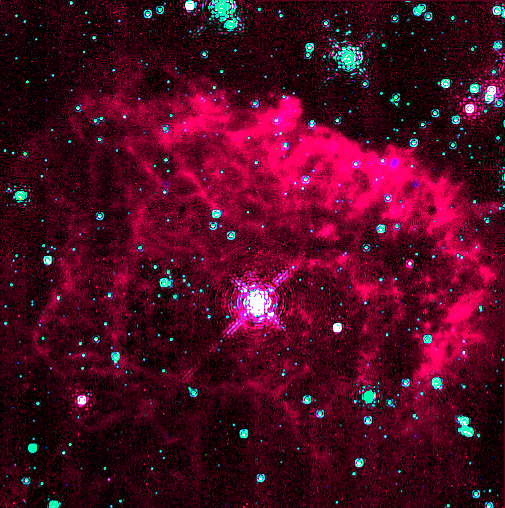

Hubble Uncovers Brilliant Star in Milky Way's Core

One of the intrinsically brightest stars in our galaxy appears as the bright white dot in the centre of this image taken with the NASA/ESA Hubble Space Telescope. Hubble's Near Infrared Camera and Multi-Object Spectrometer (NICMOS) was needed to take the picture, because the star is hidden at the galactic center, behind obscuring dust. NICMOS' infrared vision penetrated the dust to reveal the star, which is glowing with the radiance of 10 million suns.

Credit: Don F. Figer (UCLA), and NASA/ESA